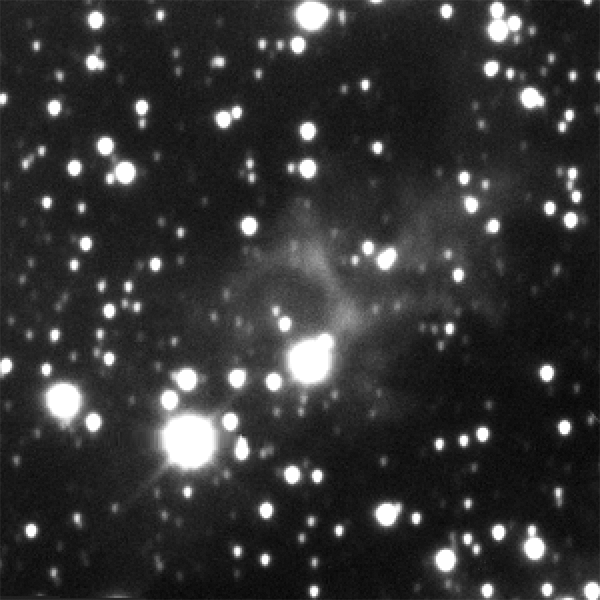

Eta Carinae light echo brightening — 10 May 2010

The double-star system Eta Carinae, about 120 times more massive than the Sun, produced a spectacular outburst that was seen on Earth from 1837 to 1858. This image shows the light from Eta Carinae's outburst illuminating the dust clouds near the doomed star system as it moves through them. The effect is like shining a flashlight on different regions of a vast cavern. The image was taken in March 2010 with the NOAO Optical Astronomy Observatory's Blanco 4-metre telescope at the Cerro Tololo Inter-American Observatory in Chile.

Credit: NASA, NOAO, and A. Rest (STScI)